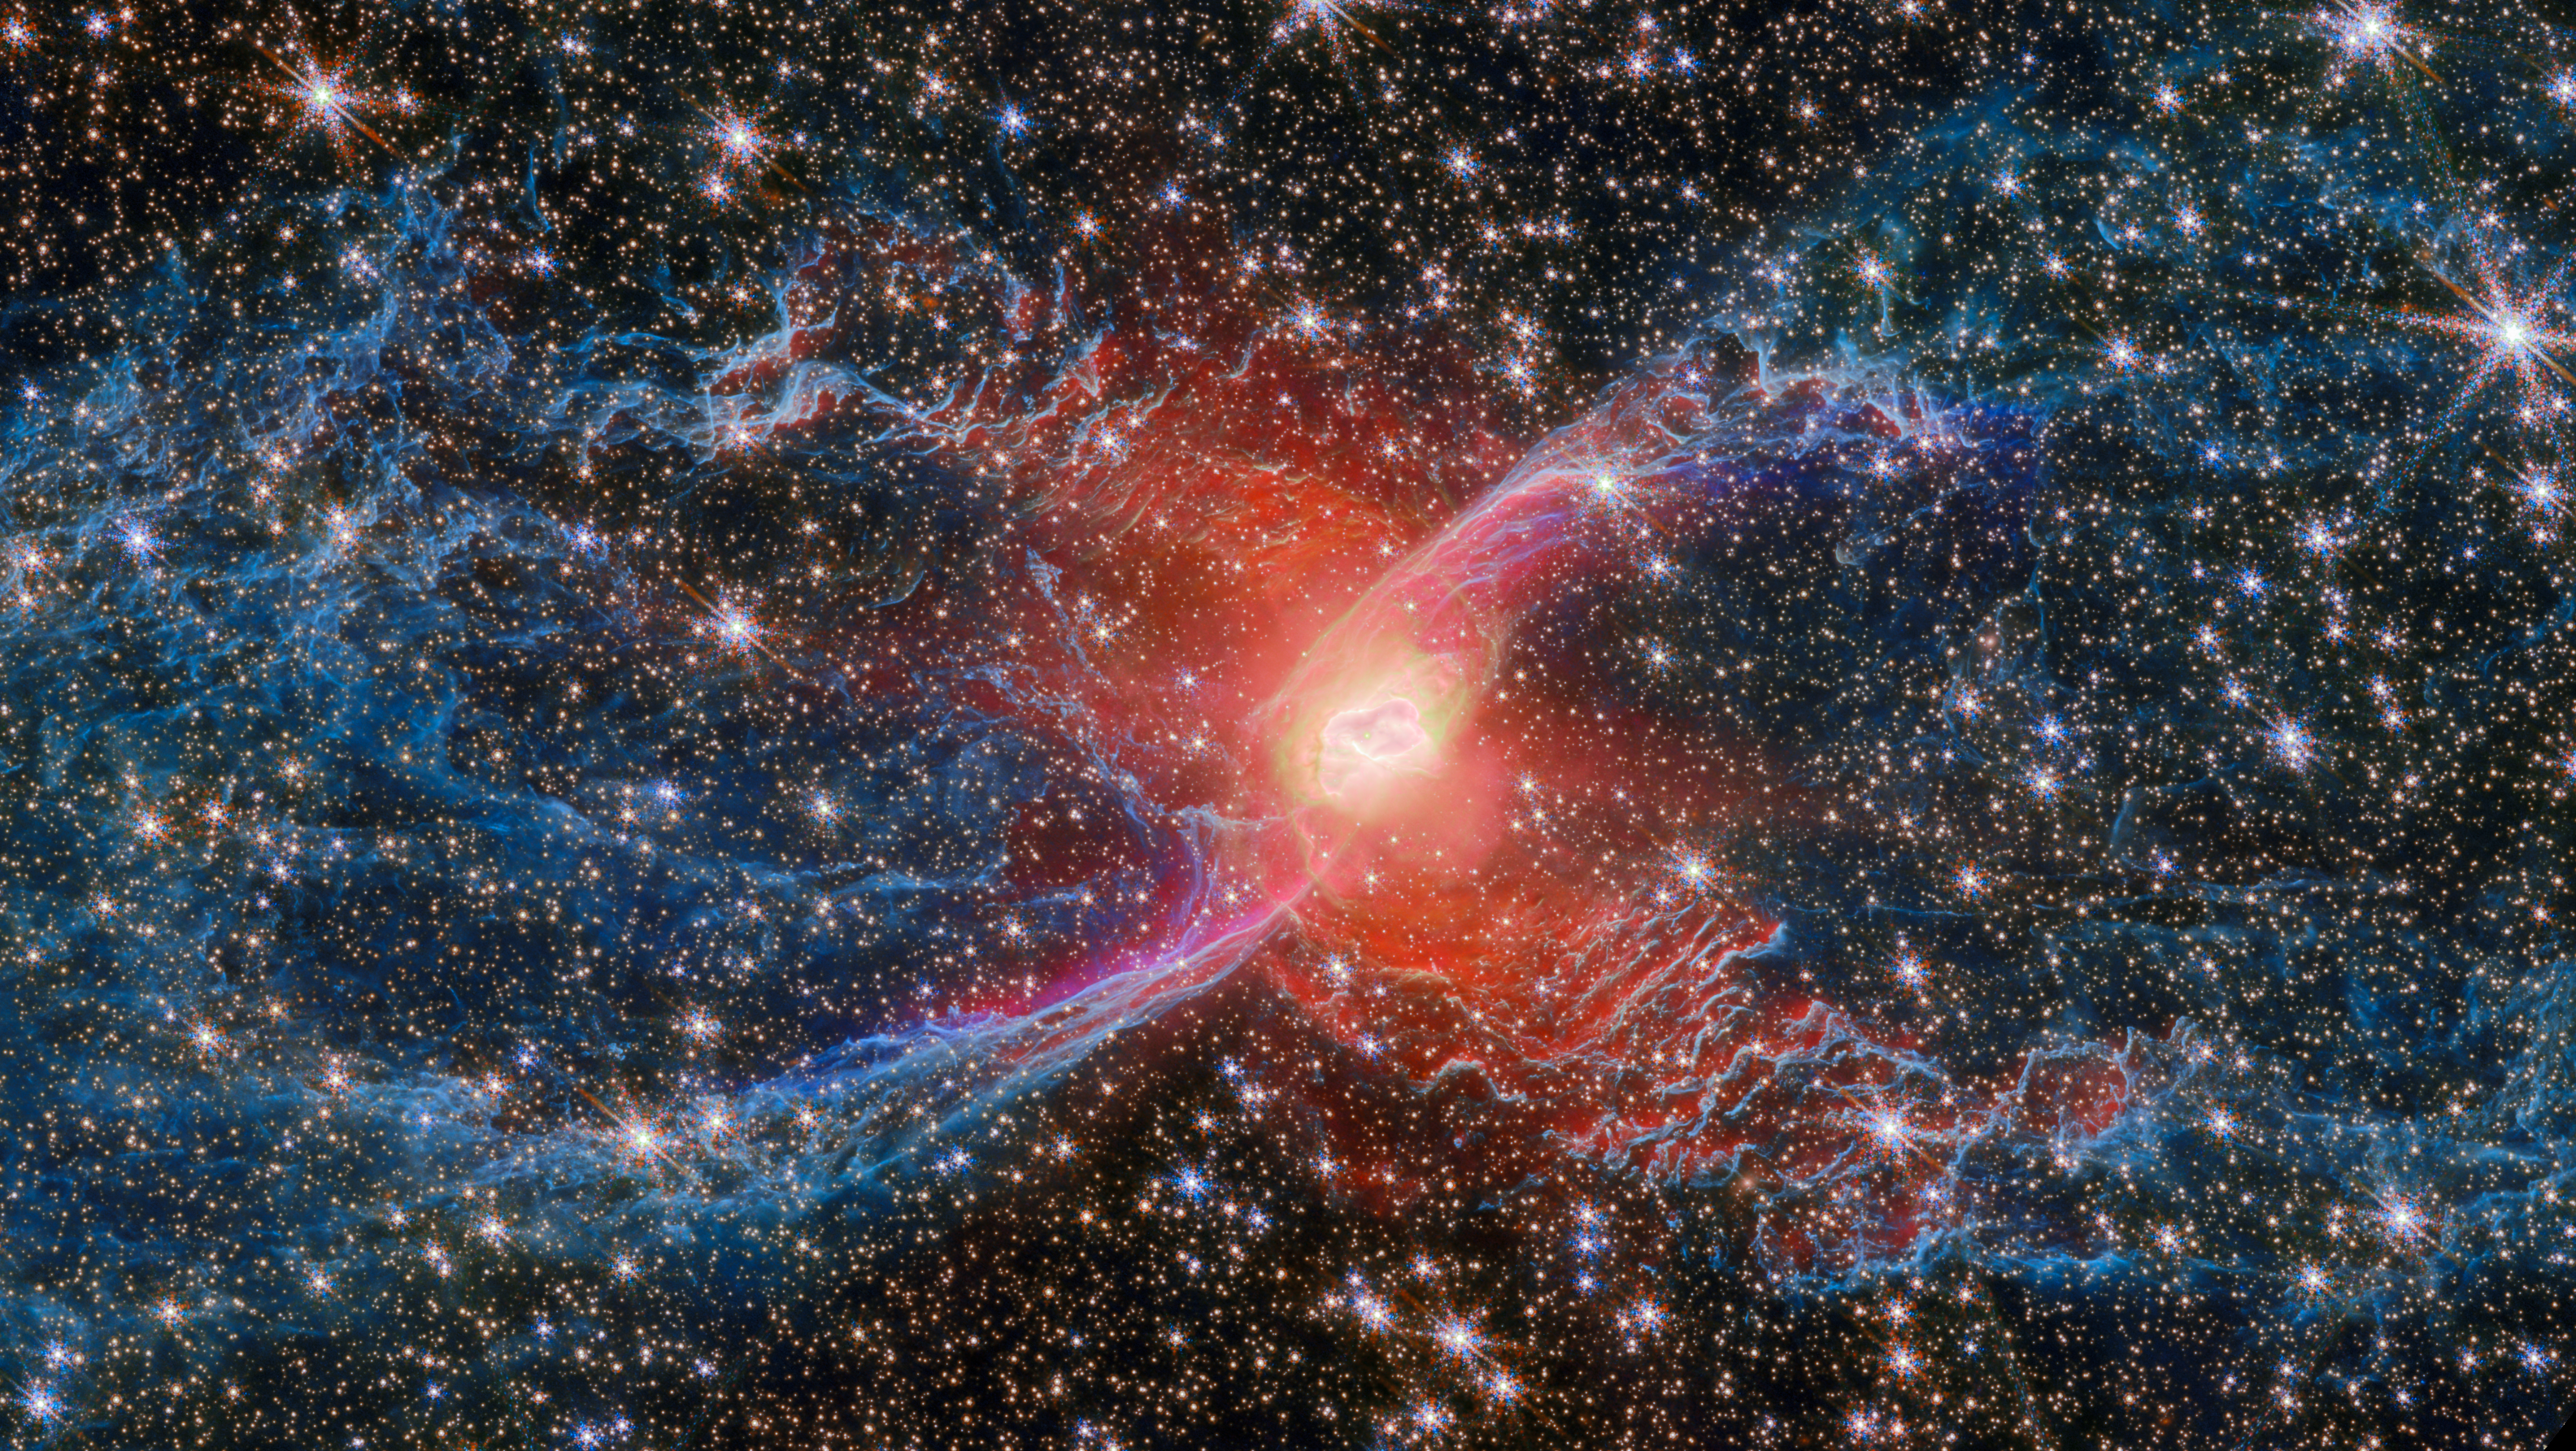

Webb zooms in on the Red Spider Nebula, NGC 6537

This new NASA/ESA/CSA James Webb Space Telescope Picture of the Month features a cosmic creepy-crawly called NGC 6537 — the Red Spider Nebula. Using its Near-InfraRed Camera (NIRCam), Webb has revealed never-before-seen details in this picturesque planetary nebula with a rich backdrop of thousands of stars.

Planetary nebulae like the Red Spider Nebula form when ordinary stars like the Sun reach the end of their lives. After ballooning into cool red giants, these stars shed their outer layers and cast them into space, exposing their white-hot cores. Ultraviolet light from the central star ionises the cast-off material, causing it to glow. The planetary nebula phase of a star’s life is as fleeting as it is beautiful, lasting only a few tens of thousands of years.

This image zooms in on the centre of the nebula, where the searing hot core of a dying star strips electrons from the dusty gas that surrounds it. Though only one star is faintly visible at the heart of the nebula, researchers suspect that many of the nebula’s characteristics are caused by the presence of a second star.

Extending outward to either side of the nebula’s centre are two massive lobes that have resulted from thousands of years of mass loss from the central star. The blue of the lobes traces light from molecular hydrogen gas, while the purple ‘S’-shape that borders the inside edge of the lobes is due to ionised iron atoms. The ionised iron arises from a powerful jet that has emerged from the central star and collided with the previously expelled gas, showing how the central star continues to sculpt the nebula today.

Credit: ESA/Webb, NASA & CSA, J. H. Kastner (Rochester Institute of Technology)